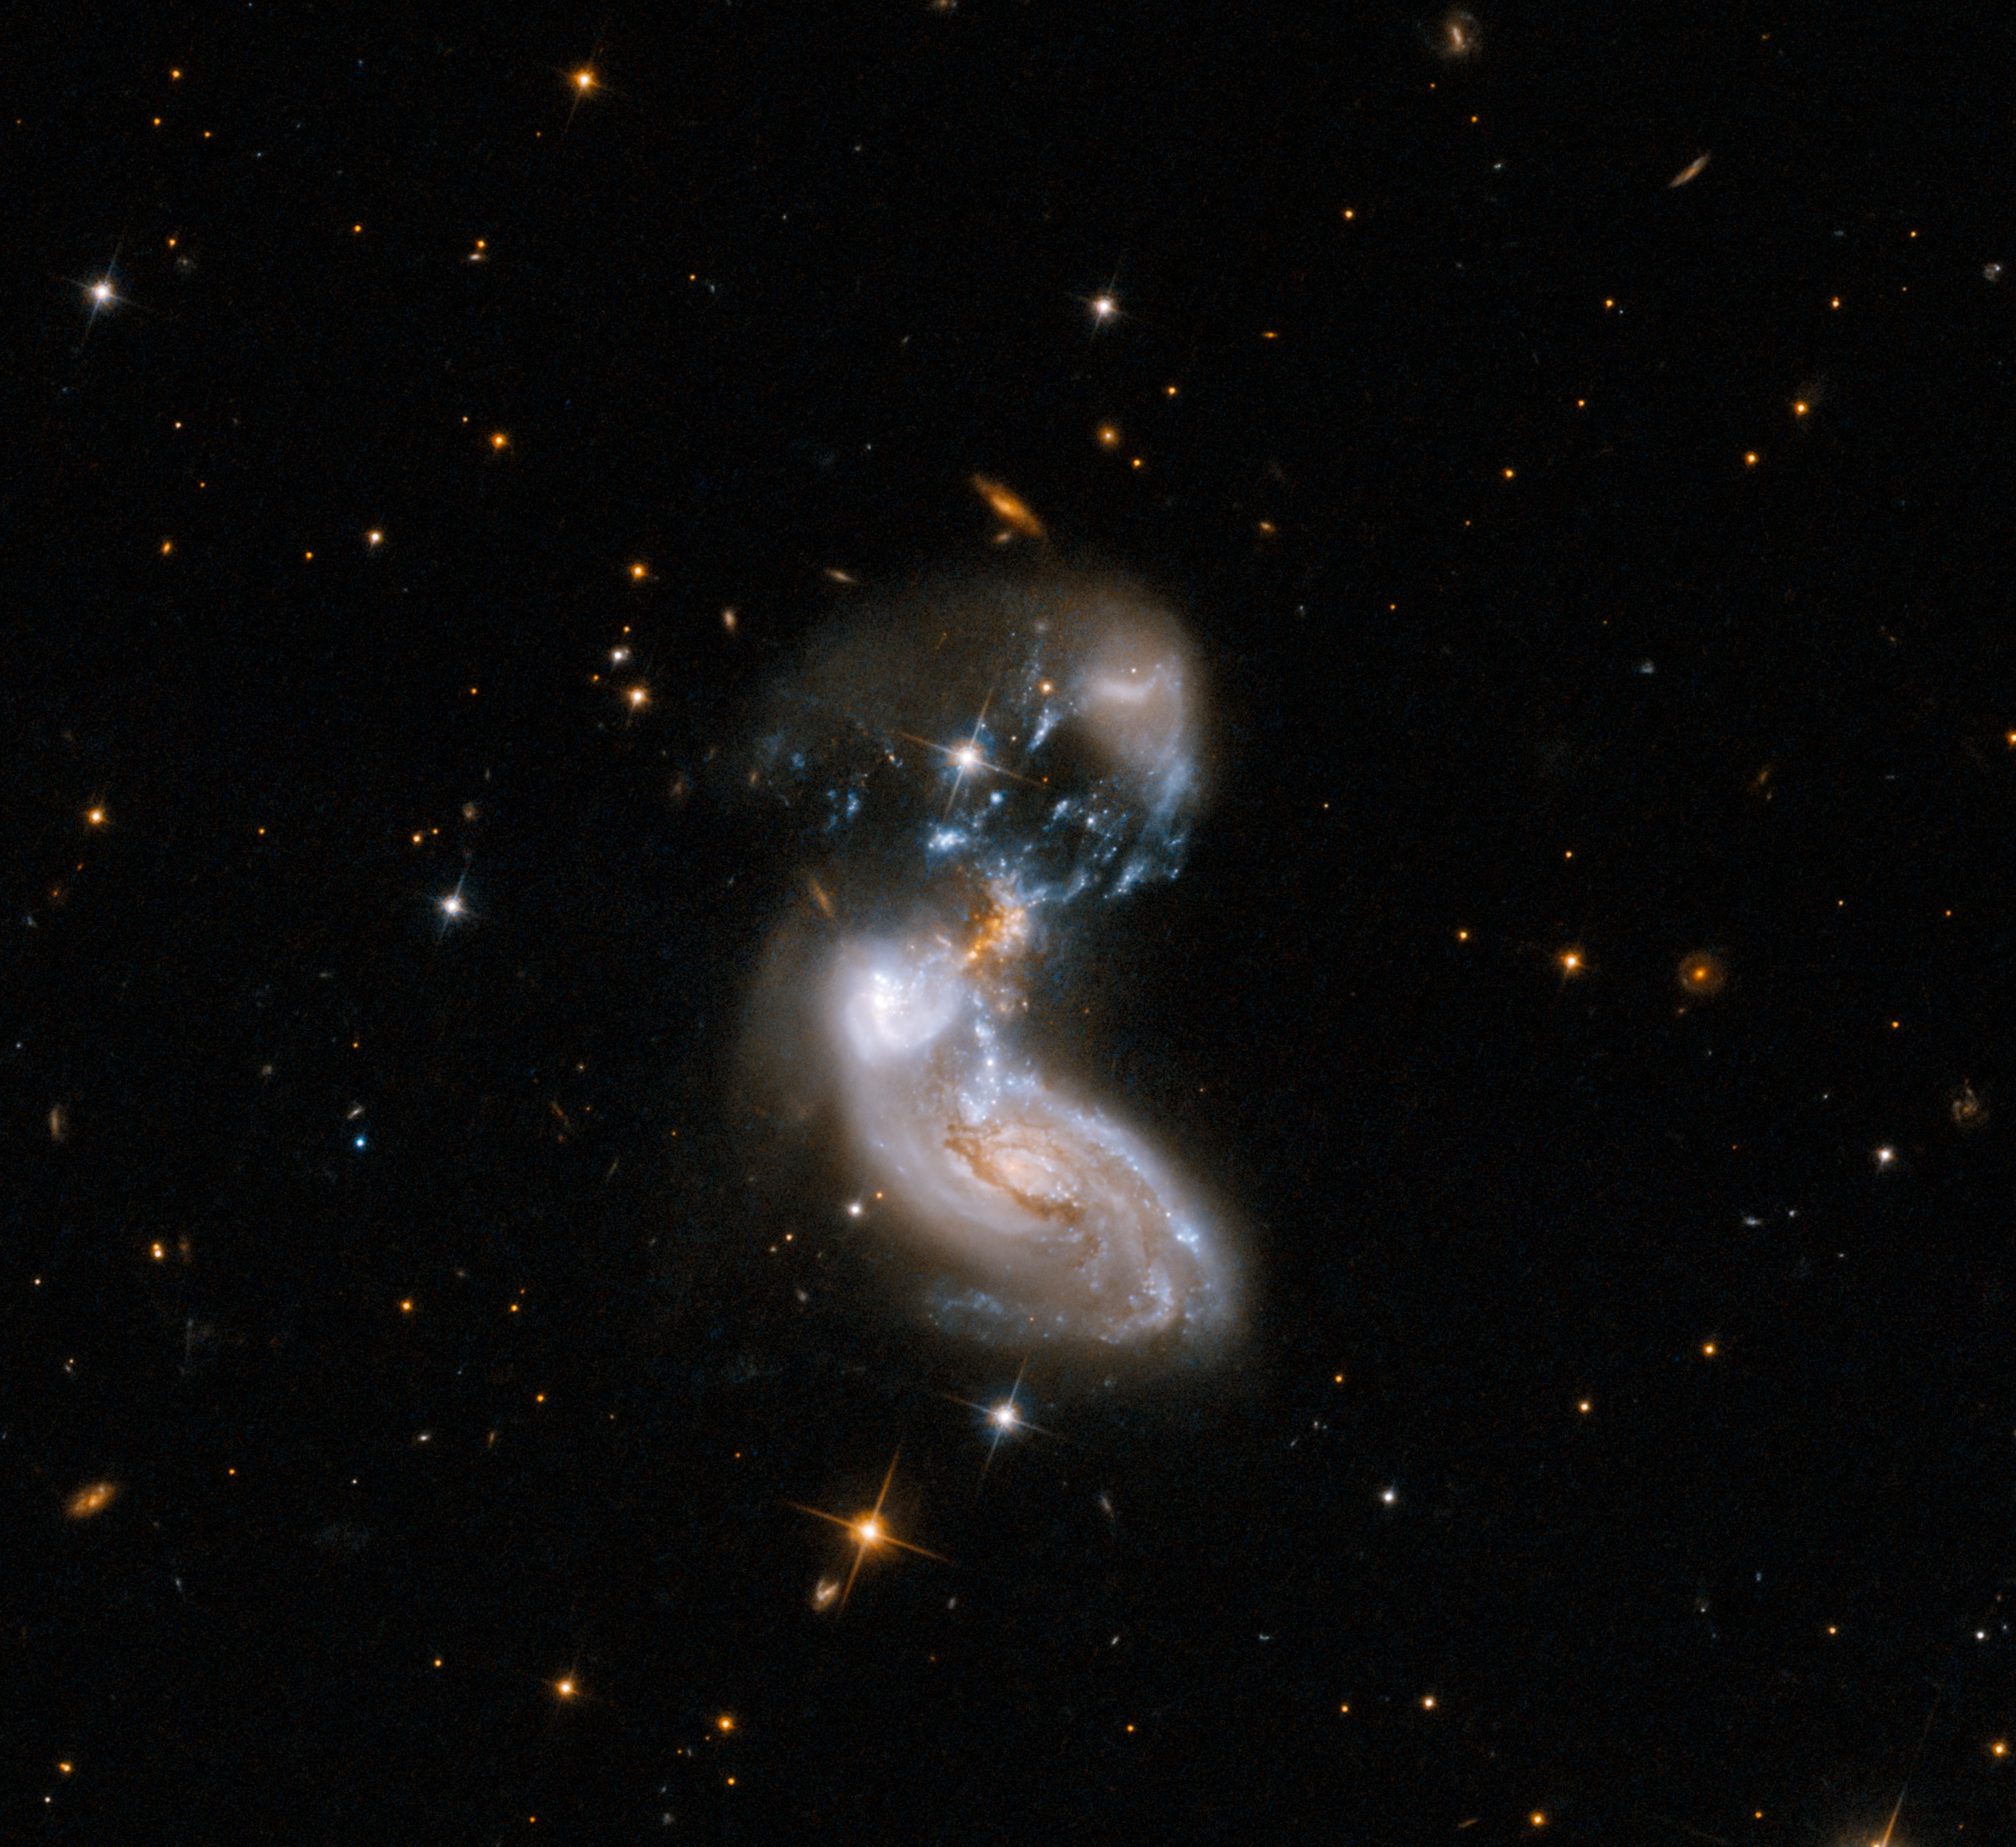

Galactic Get-Together

This is an image of II ZW 96 released by the NASA/ESA Hubble Space Telescope in 2008 for the telescope’s 18th anniversary. Hubble provides a unique view of this bizarre galaxy merger in visible wavelengths. This version has been scaled to match the size and orientation of the new Webb image of II ZW 96.

Credit: NASA, ESA, the Hubble Heritage Team (STScI/AURA)-ESA/Hubble Collaboration and A. Evans (University of Virginia, Charlottesville/NRAO/Stony Brook University)